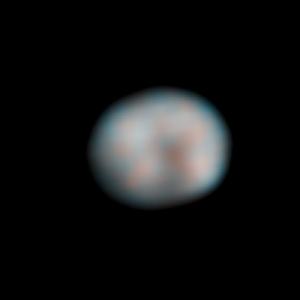

Vesta - HST - 368° longitude

Vesta - HST - 368° longitude

Credit: NASA, ESA, J.-Y. Li (University of Maryland, College Park), and L. McFadden (NASA/GSFC)